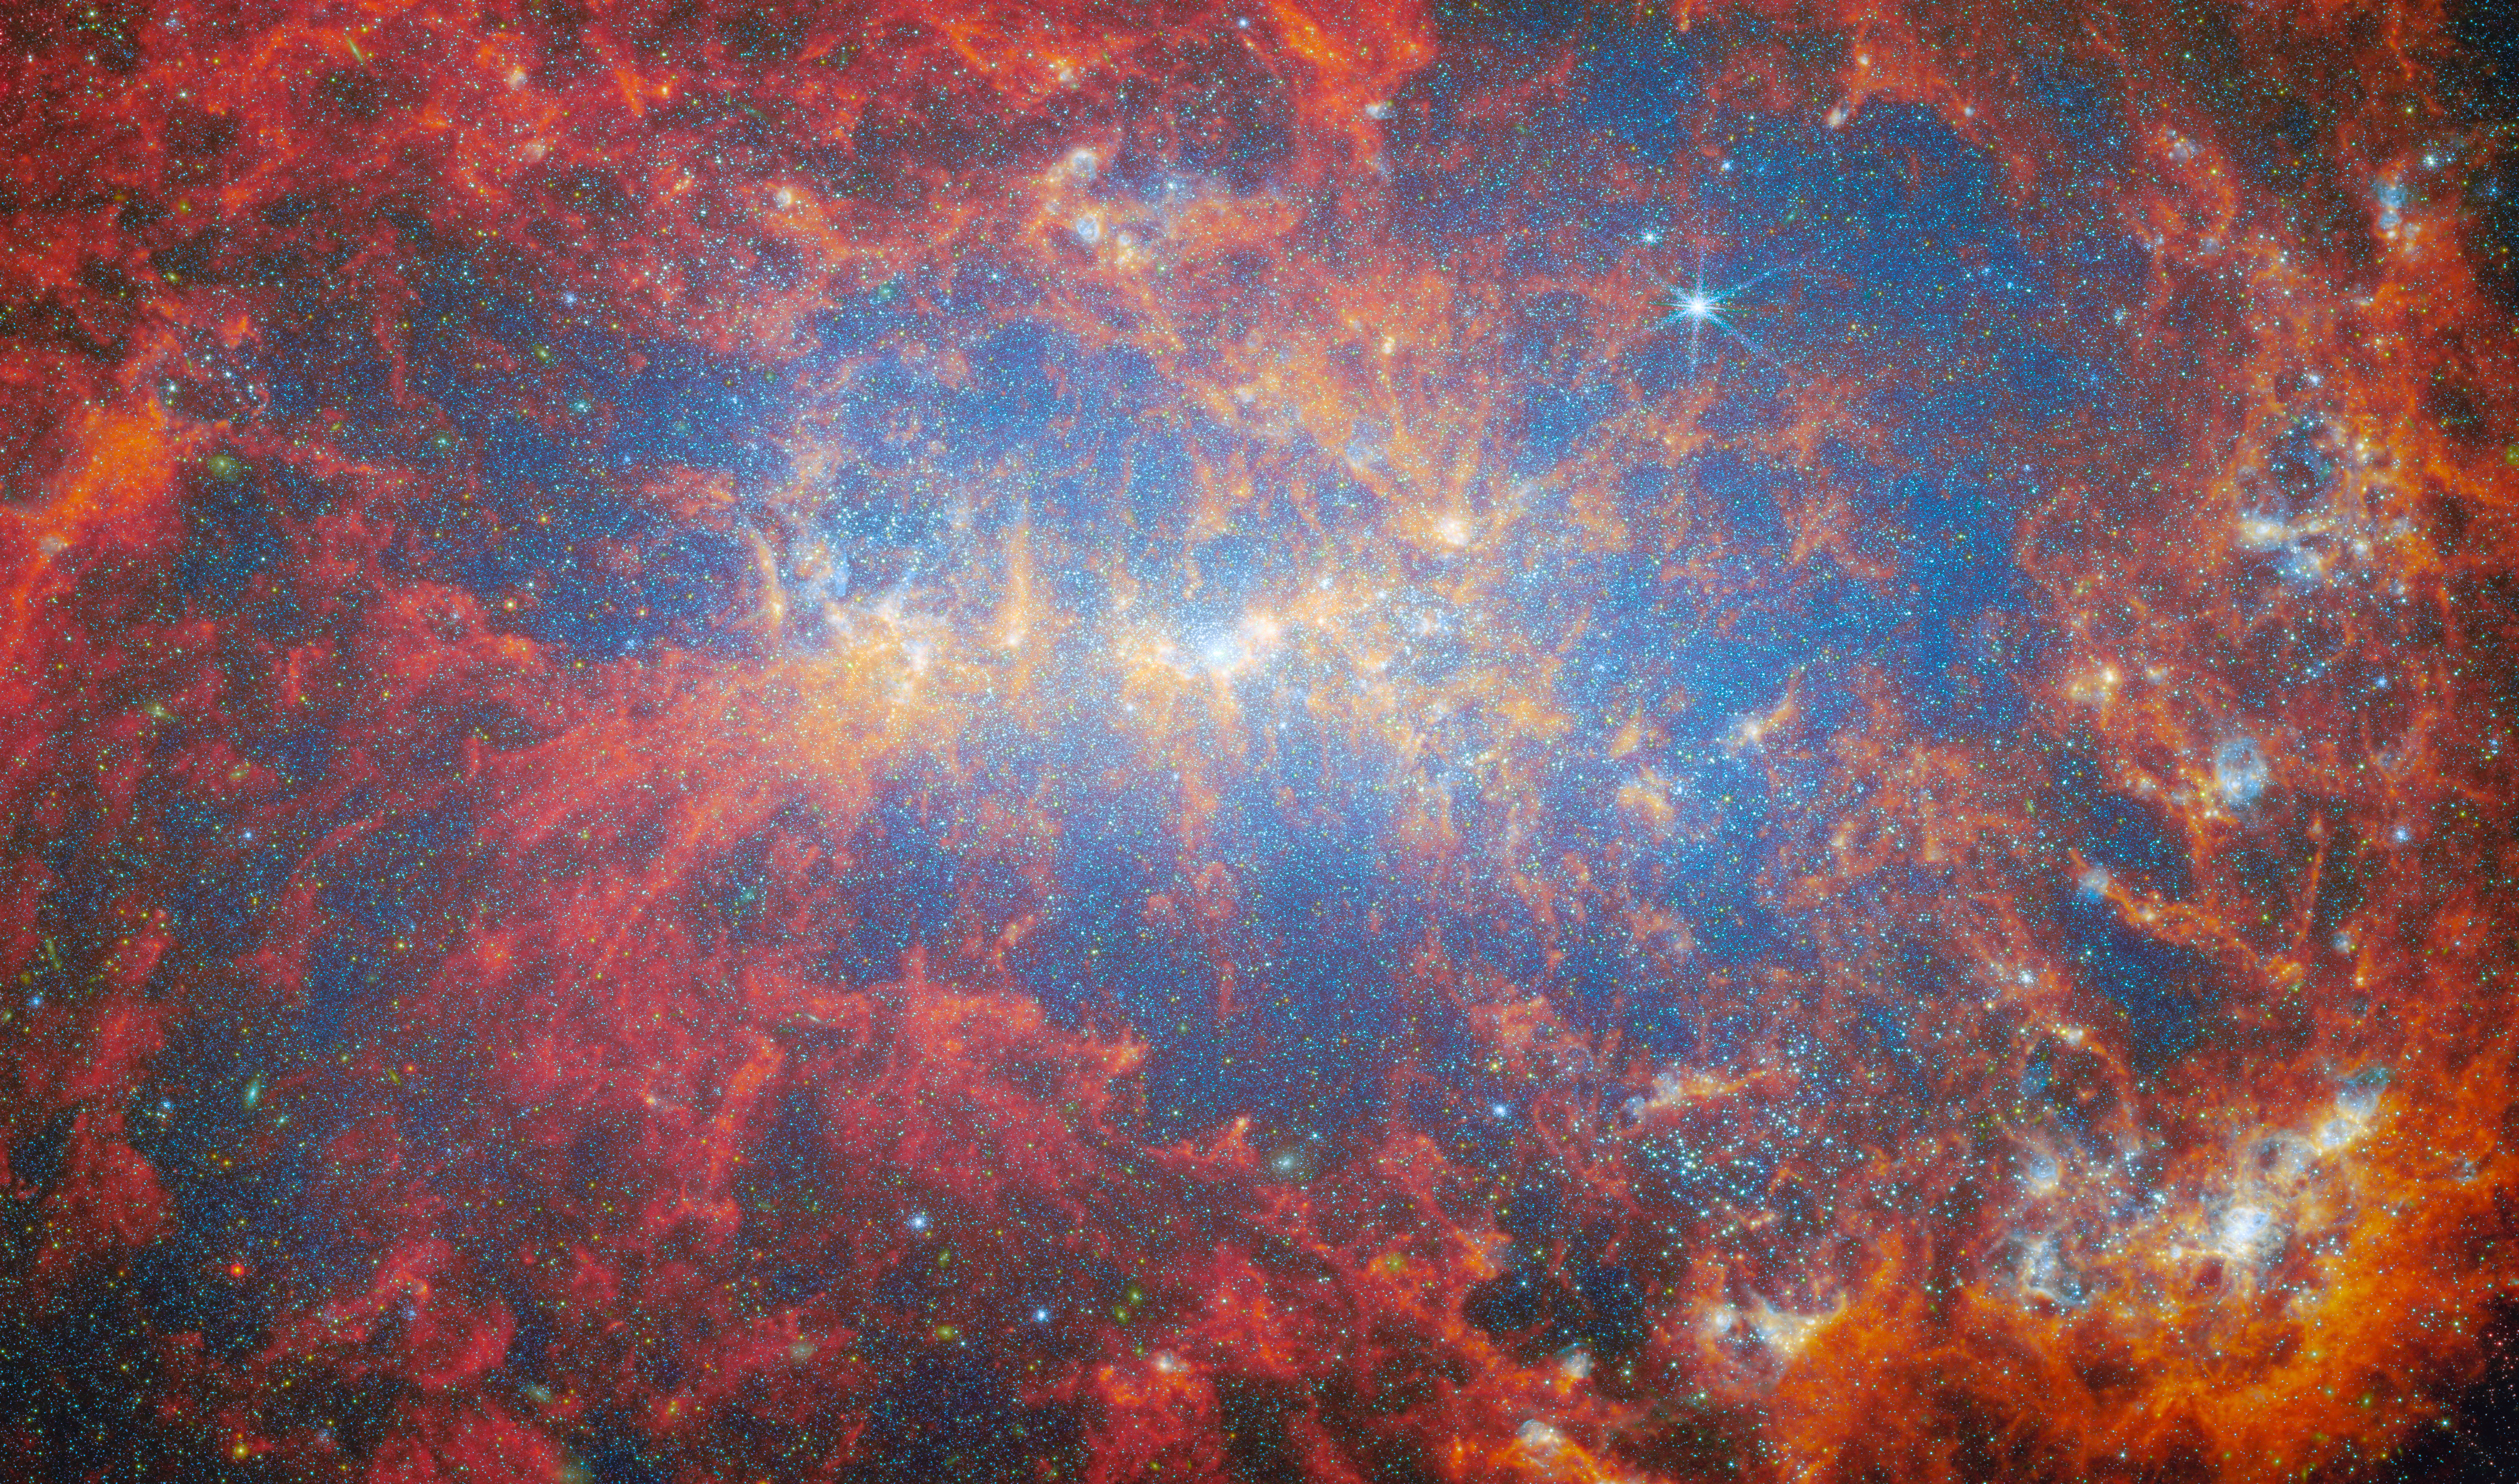

Fireworks of stellar starbursts

Featured in this new image from the NASA/ESA/CSA James Webb Space Telescope is the dwarf galaxy NGC 4449. This galaxy, also known as Caldwell 21, resides roughly 12.5 million light-years away in the constellation Canes Venatici. It is part of the M94 galaxy group, which lies close to the Local Group that hosts our Milky Way.

NGC 4449 has been forming stars for several billion years, but it is currently experiencing a period of star formation at a much higher rate than in the past. Such unusually explosive and intense star formation activity is called a starburst and for that reason NGC 4449 is known as a starburst galaxy. In fact, at the current rate of star formation, the gas supply that feeds the production of stars would only last for another billion years or so. Starbursts usually occur in the central regions of galaxies, but NGC 4449 displays more widespread star formation activity, and the very youngest stars are observed both in the nucleus and in streams surrounding the galaxy. It's likely that the current widespread starburst was triggered by interaction or merging with a smaller companion; indeed, astronomers think NGC 4449's star formation has been influenced by interactions with several of its neighbours.

NGC 4449 resembles primordial star-forming galaxies which grew by merging with and accreting smaller stellar systems. Since NGC 4449 is close enough to be observed in great detail, it is the ideal laboratory for astronomers to study what may have occurred during galaxy formation and evolution in the early Universe.

This new image makes use of data from two of Webb’s instruments: MIRI (Mid-InfraRed Instrument) and NIRCam (Near-InfraRed Camera). Observations in the infrared reveal the galaxy’s creeping tendrils of gas, dust and stars. The bright blue spots reveal countless individual stars, while the bright yellow regions that weave throughout the galaxy indicate concentrations of active stellar nurseries, where new stars are forming. The orange-red areas indicate the distribution of a type of carbon-based compounds known as polycyclic aromatic hydrocarbons (or PAHs) — the MIRI F770W filter is particularly suited to imaging these important molecules. The bright red spots correspond to regions rich in hydrogen that have been ionised by the radiation from the newly formed stars. The diffuse gradient of blue light around the central region shows the distribution of older stars. The compact light-blue regions within the red ionised gas, mostly concentrated in the galaxy’s outer region, show the distribution of young star clusters.

NGC 4449 was observed by Webb as part of a series of observations collectively titled Feedback in Emerging extrAgalactic Star clusTers, or FEAST (PI: A. Adamo). Two other targets of the FEAST programme, M51, and M83, were the subjects of previous ESA/Webb Picture of the Month images in 2023.

Credit: ESA/Webb, NASA & CSA, A. Adamo (Stockholm University) and the FEAST JWST team